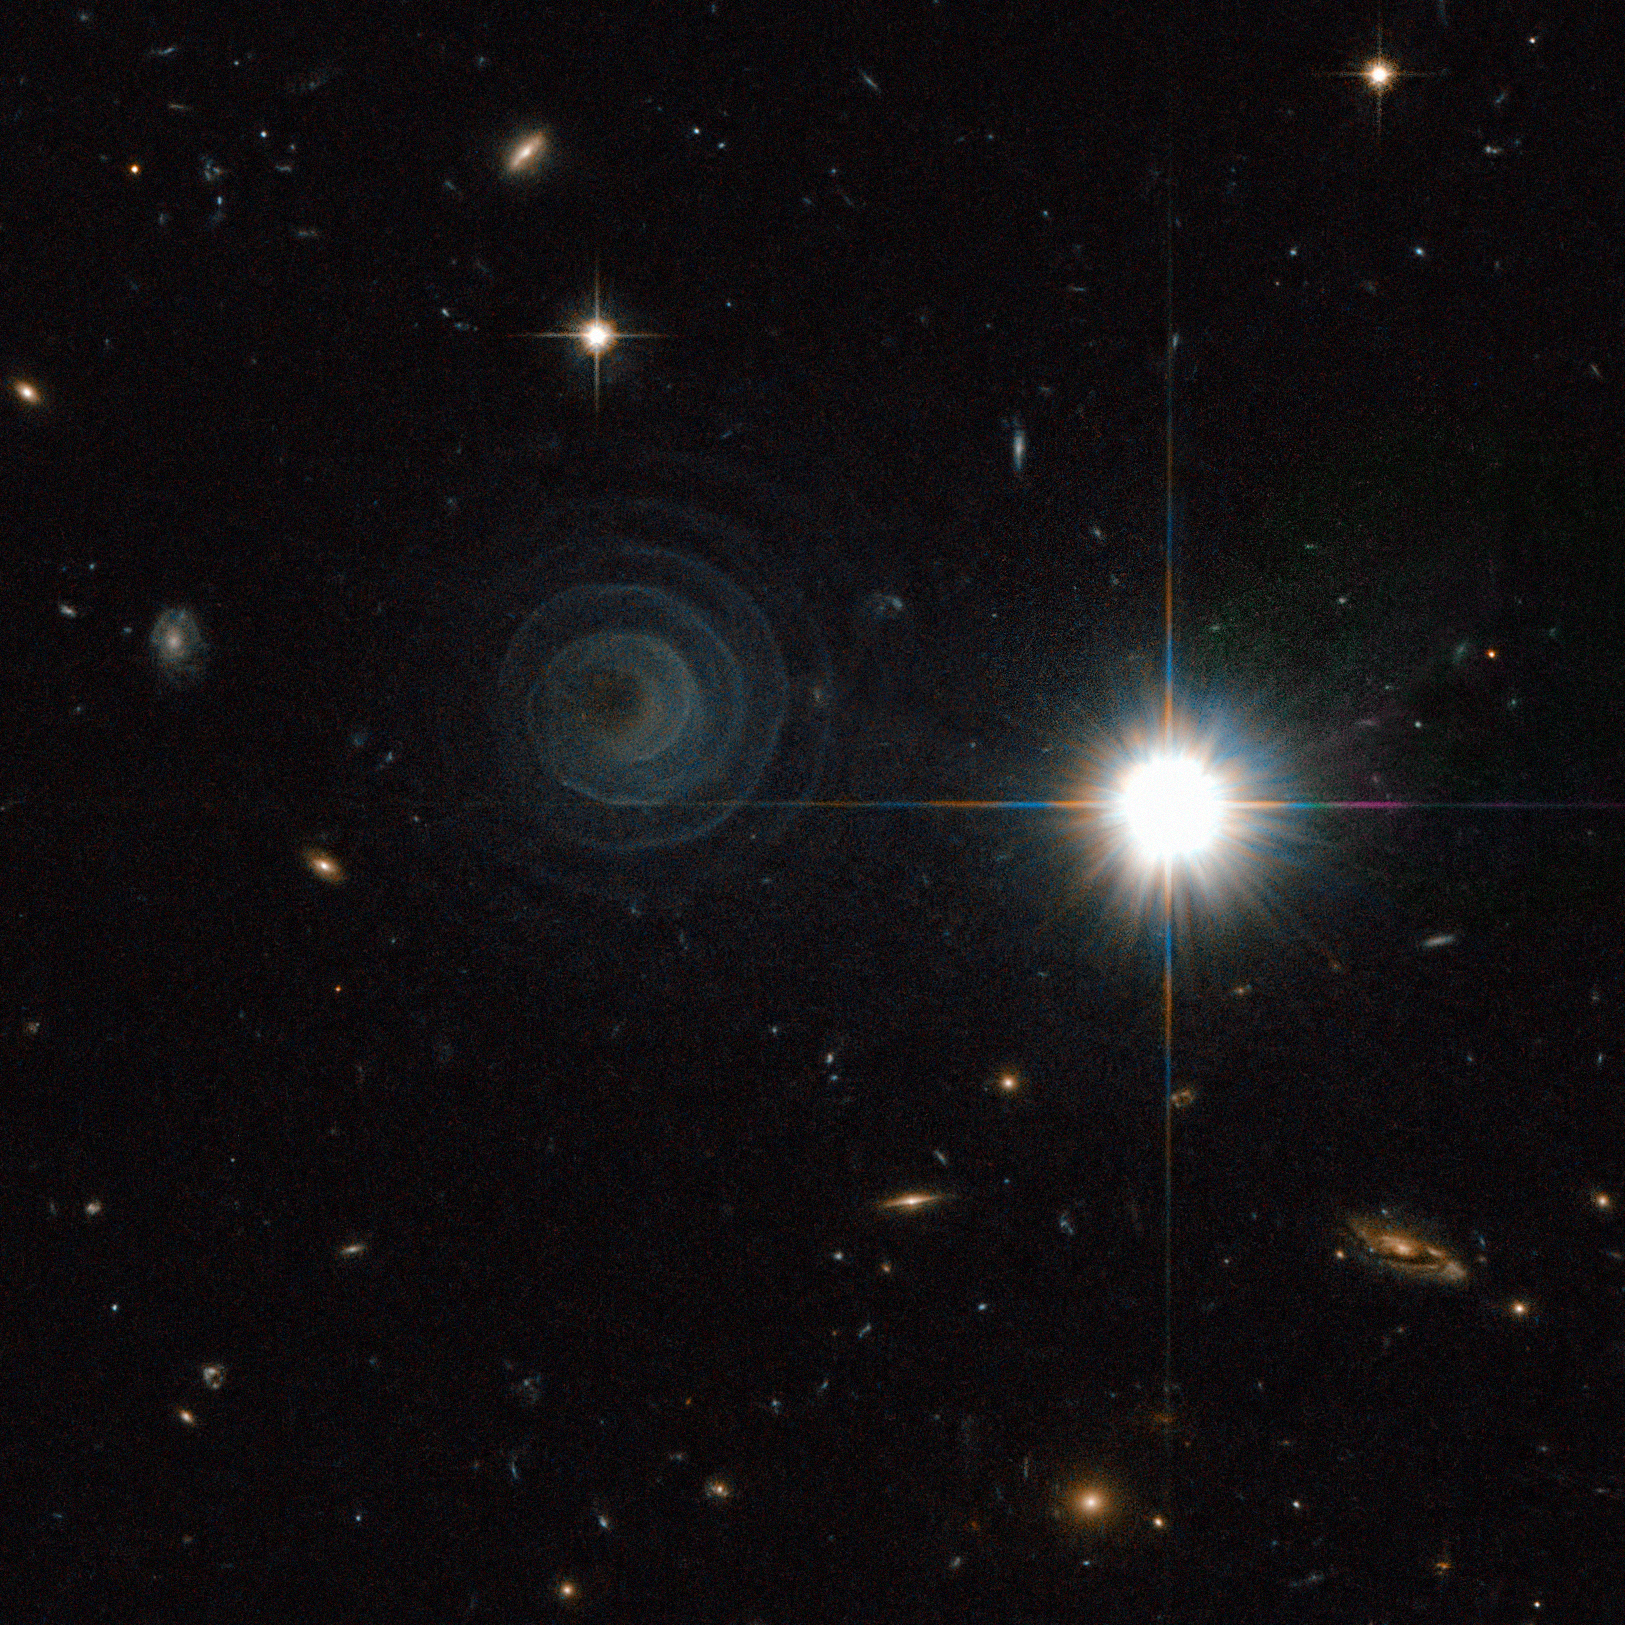

An extraordinary celestial spiral

This remarkable picture from the Advanced Camera for Surveys on the NASA/ESA Hubble Space Telescope shows one of the most perfect geometrical forms created in space. It captures the formation of an unusual pre-planetary nebula, known as IRAS 23166+1655, around the star LL Pegasi (also known as AFGL 3068) in the constellation of Pegasus (the Winged Horse).

The striking picture shows what appears to be a thin spiral pattern of astonishingly regularity winding around the star, which is itself hidden behind thick dust. The spiral pattern suggests a regular periodic origin for the nebula’s shape. The material forming the spiral is moving outwards a speed of about 50 000 km/hour and, by combining this speed with the distance between layers, astronomers calculate that the shells are each separated by about 800 years.

The spiral is thought to arise because LL Pegasi is a binary system, with the star that is losing material and a companion star orbiting each other. The spacing between layers in the spiral is expected to directly reflect the orbital period of the binary, which is indeed estimated to be also about 800 years.

The creation and shaping of planetary nebulae is an exciting area of stellar evolution. Stars with masses from about half that of the Sun up to about eight times that of the Sun do not explode as supernovae at the ends of their lives. Instead a more regal end awaits them as their outer layers of gas are shed and drift into space, creating striking and intricate structures that to Earth-bound observers often look like dramatic watercolour paintings. IRAS 23166+1655 is just starting this process and the central star has yet to emerge from the cocoon of enveloping dust.

This picture was created from images from the Wide Field Channel of the Advanced Camera for Surveys on Hubble. Images through a yellow filter (F606W, coloured blue) were combined with images through a near-infra red filter (F804W, coloured red). The exposure times were 11 minutes and 22 minutes respectively and the field of view spans about 80 arcseconds.

Credit: ESA/NASA & R. Sahai